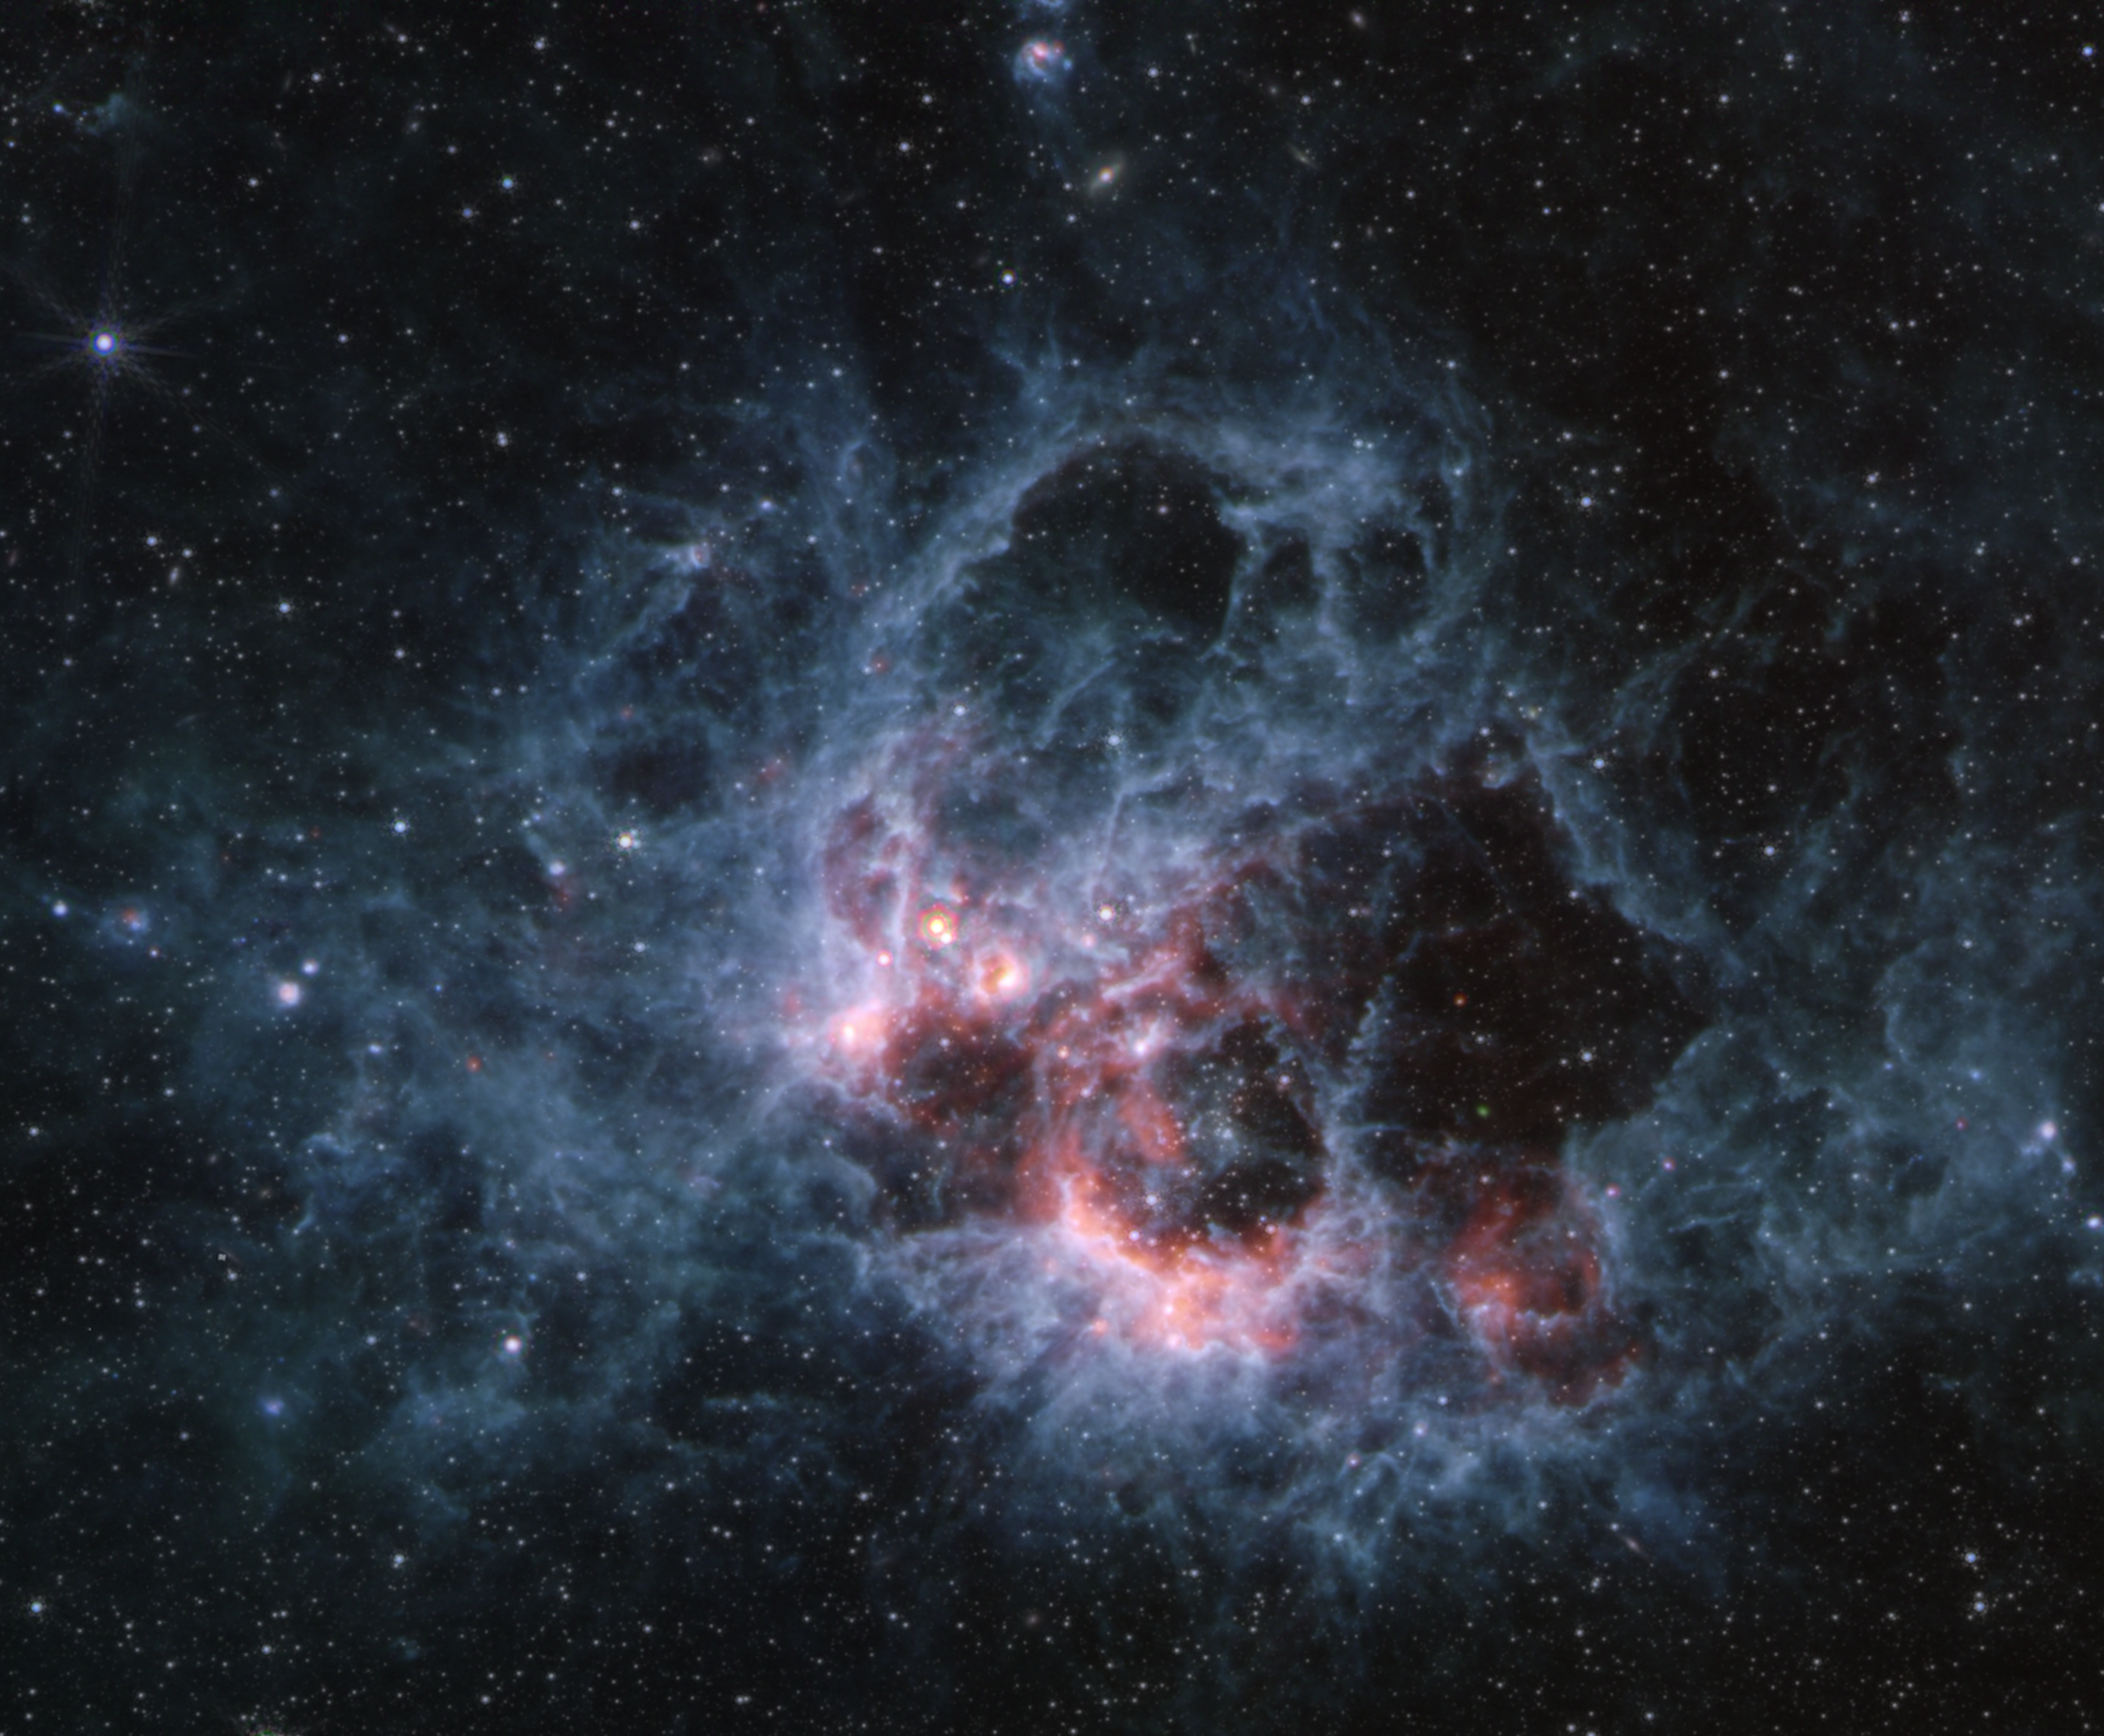

NGC 604 (MIRI image)

This image from the NASA/ESA/CSA James Webb Space Telescope’s MIRI (Mid-Infrared Instrument) of star-forming region NGC 604 shows how large clouds of cooler gas and dust glow at mid-infrared wavelengths. This region is a hotbed of star formation and home to more than 200 of the hottest, most massive kinds of stars, all in the early stages of their lives.

In the MIRI view of NGC 604, there are noticeably fewer stars than Webb’s NIRCam image. This is because hot stars emit much less light at these wavelengths. Some of the stars seen in this image are red supergiants — stars that are cool but very large, hundreds of times the diameter of our Sun. The blue tendrils of material signify the presence of polycyclic aromatic hydrocarbons, or PAHs.

Credit: NASA, ESA, CSA, STScI